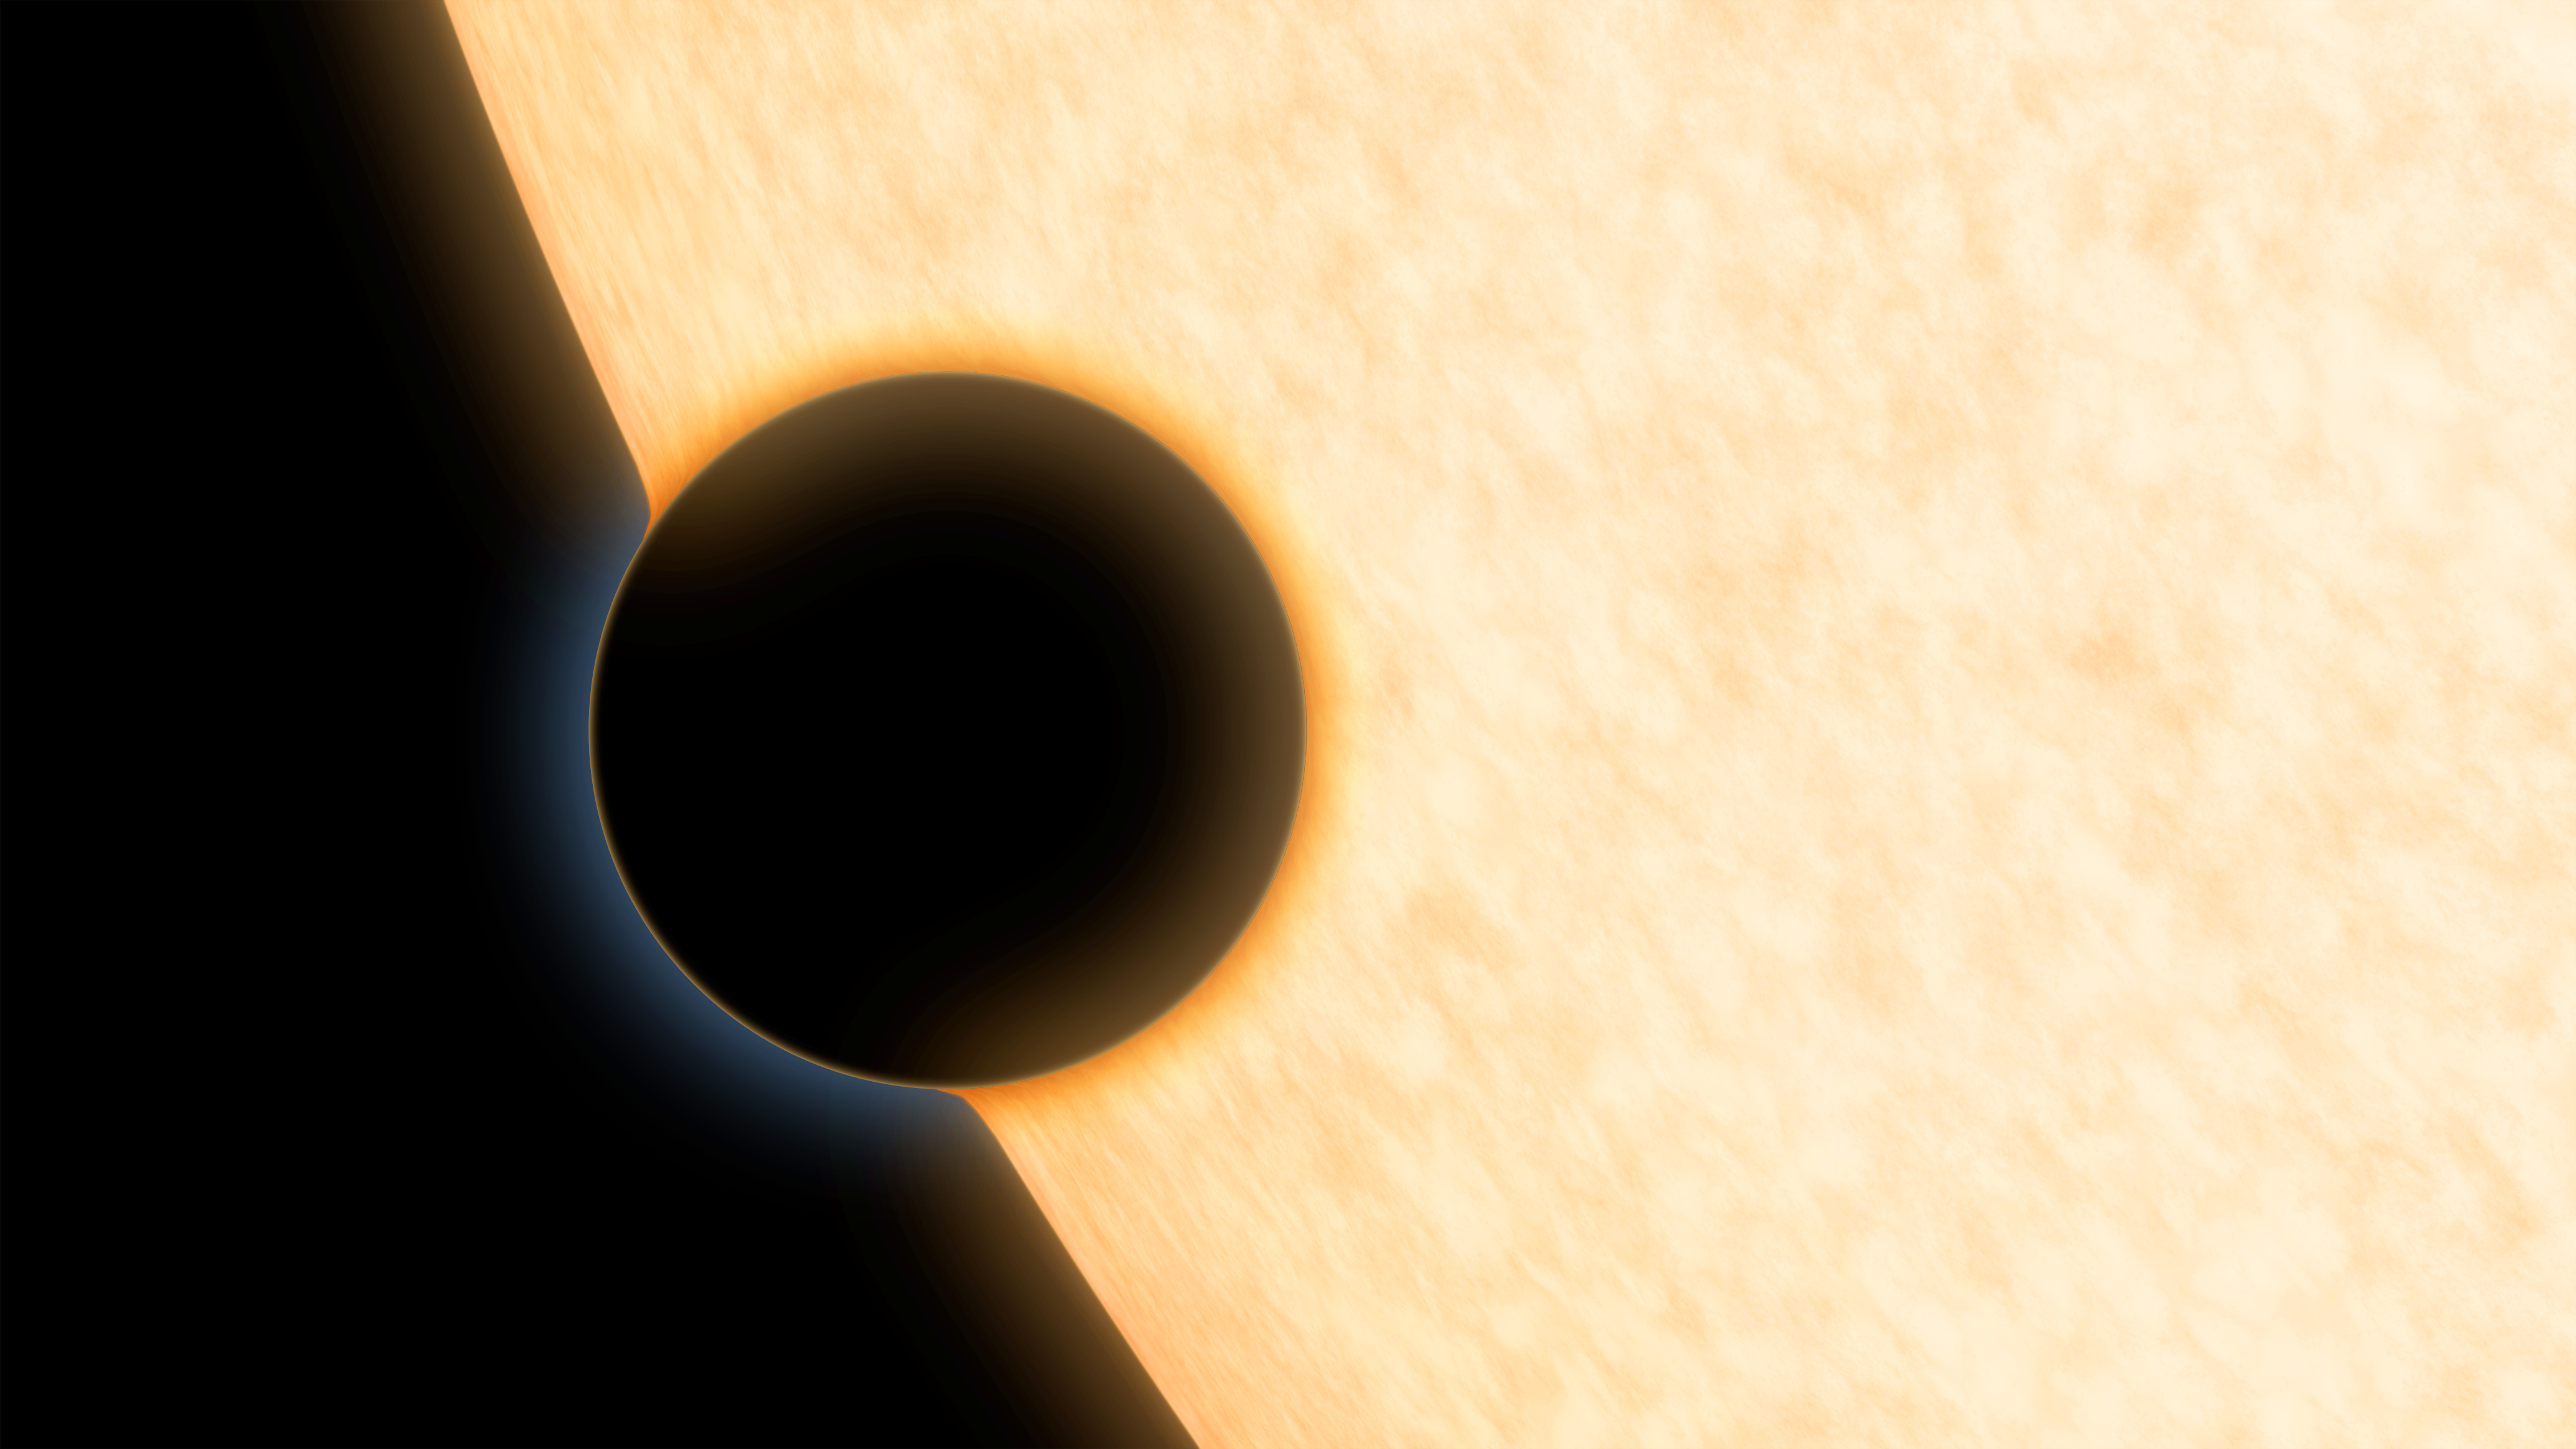

Artist illustration of planet HAT-P-11b

This is an artist's concept of the silhouette of the extrasolar planet HAT-P-11b as it passes its parent star. The planet was observed as it crossed in front of its star in order to learn more about its atmosphere.

In this method, known as transmission or absorption spectroscopy, starlight filters through the rim of the planet's atmosphere and into the telescope. If molecules like water vapour are present, they absorb some of the starlight, leaving distinct signatures in the light that reaches our telescopes. Using this technique, astronomers discovered clear skies and steamy water vapour on the planet.

Credit: NASA/JPL-Caltech